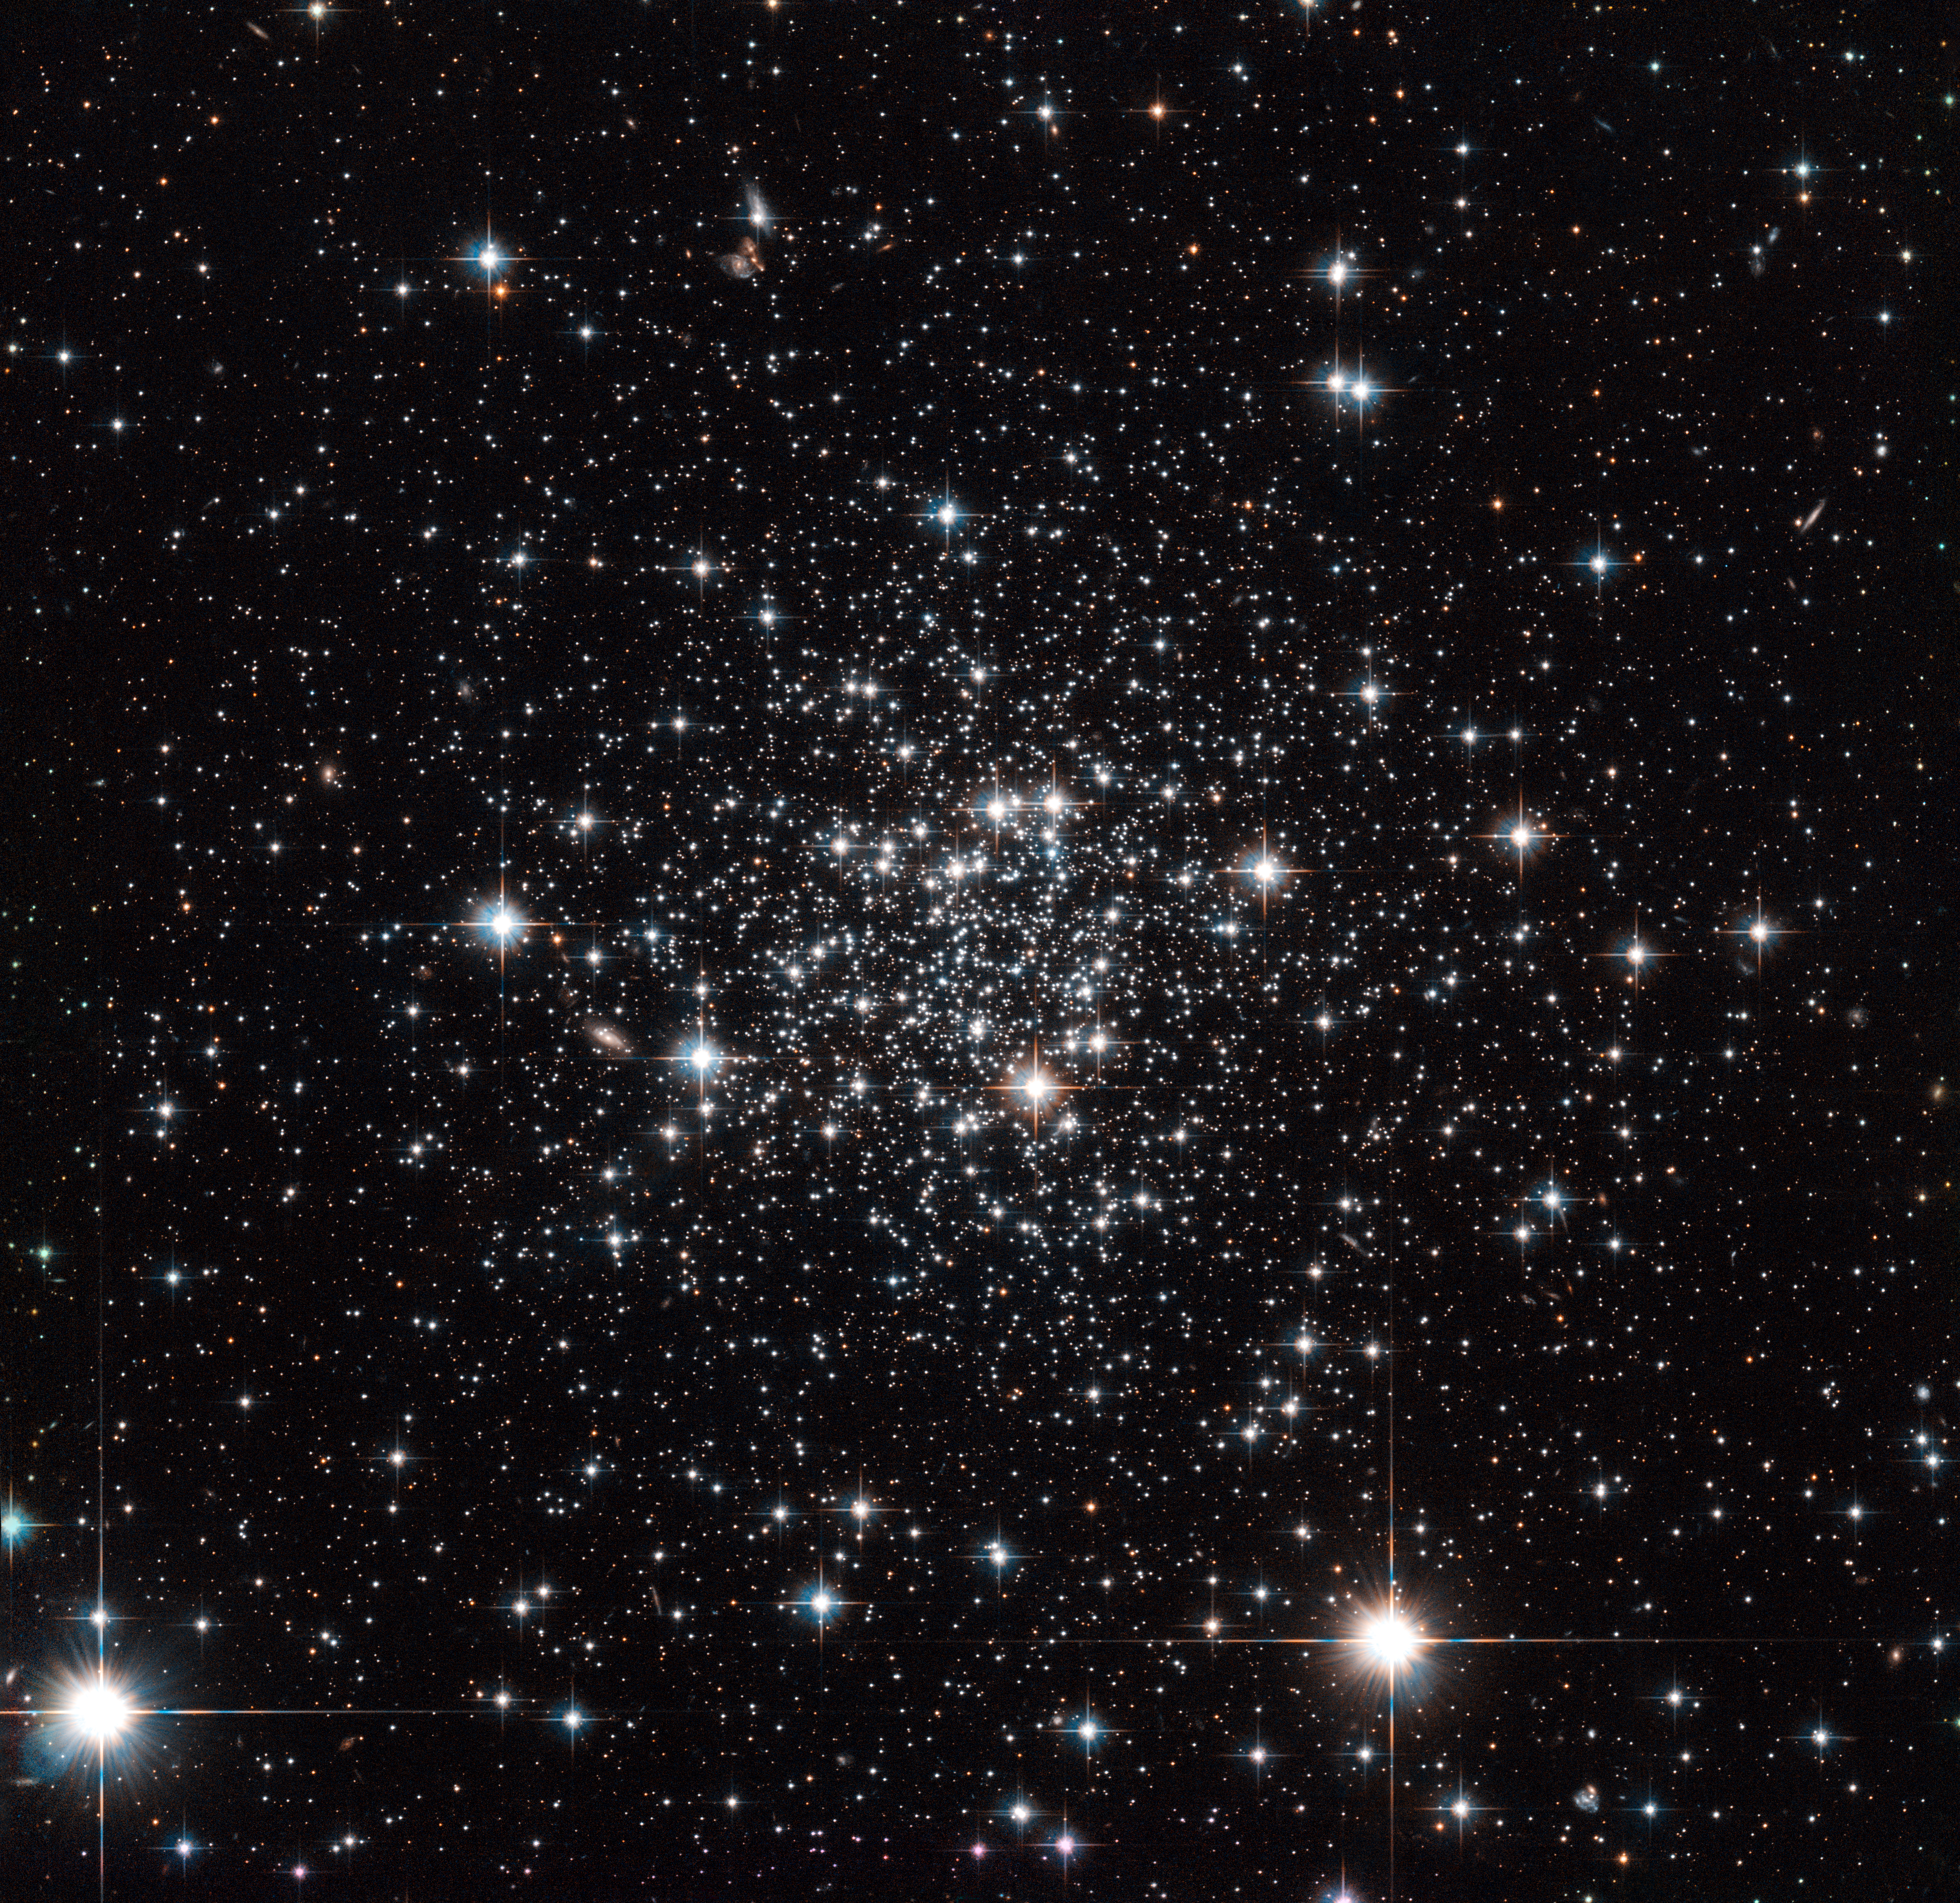

It came from outer space

Named after its discoverer, the French-Armenian astronomer Agop Terzan, this is the globular cluster Terzan 7 — a densely packed ball of stars bound together by gravity. It lies just over 75 000 light-years away from us on the other side of our galaxy, the Milky Way. It is a peculiar cluster, quite unlike others we observe, making it an intriguing object of study for astronomers.

Evidence shows that Terzan 7 used to belong to a small galaxy called the Sagittarius Dwarf Galaxy, a mini-galaxy discovered in 1994. This galaxy is currently colliding with, and being absorbed by, the Milky Way, which is a monster in size when compared to this tiny one. It seems that this cluster has already been kidnapped from its former home and now is part of our own galaxy.

Astronomers recently discovered that all the stars in Terzan 7 were born at around the same time, and are about eight billion years old. This is unusually young for such a cluster. The shared birthday is another uncommon property; a large number of globular clusters, both in the Milky Way and in other galaxies, seem to have at least two clearly differentiated generations of stars that were born at different times.

Some explanations suggest that there is something different about clusters that form within dwarf galaxies, giving them a different composition. Others suggest that clusters like Terzan 7 only have enough material to form one batch of stars, or that perhaps its youthfulness has prevented it from yet forming another generation.

A version of this image was entered into the Hubble's Hidden Treasures image processing competition by contestant Gilles Chapdelaine.

Credit: NASA, ESA, and A. Sarajedini (University of Florida) Acknowledgement: Gilles Chapdelaine